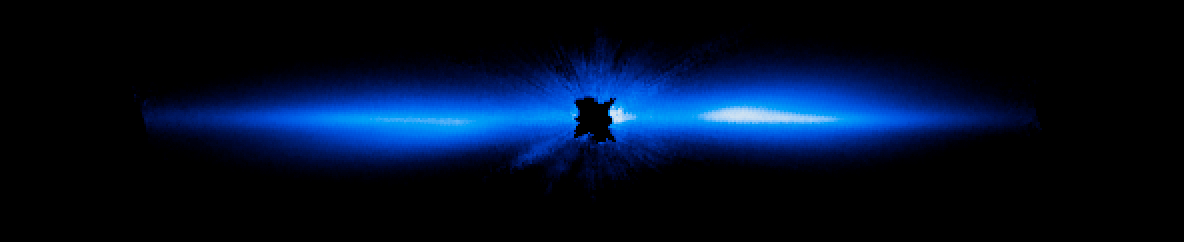

New view of Beta Pictoris

This is the most detailed picture to date of a large, edge-on, gas-and-dust disc encircling the 20 million year old star Beta Pictoris. It is compared with a previous image of the disc.

Beta Pictoris remains the only directly imaged debris disc that has a giant planet (discovered in 2009) with an orbital period short enough (estimated to be between 18 and 22 years) that astronomers can see large motion in just a few years. This allows scientists to study how the Beta Pictoris disc is distorted by the presence of a massive planet embedded within the disc.

The new visible-light Hubble image traces the disc to within about one billion kilometres of the star (which is inside the radius of Saturn's orbit about the Sun).

Credit: NASA, ESA, and D. Apai and G. Schneider (University of Arizona)